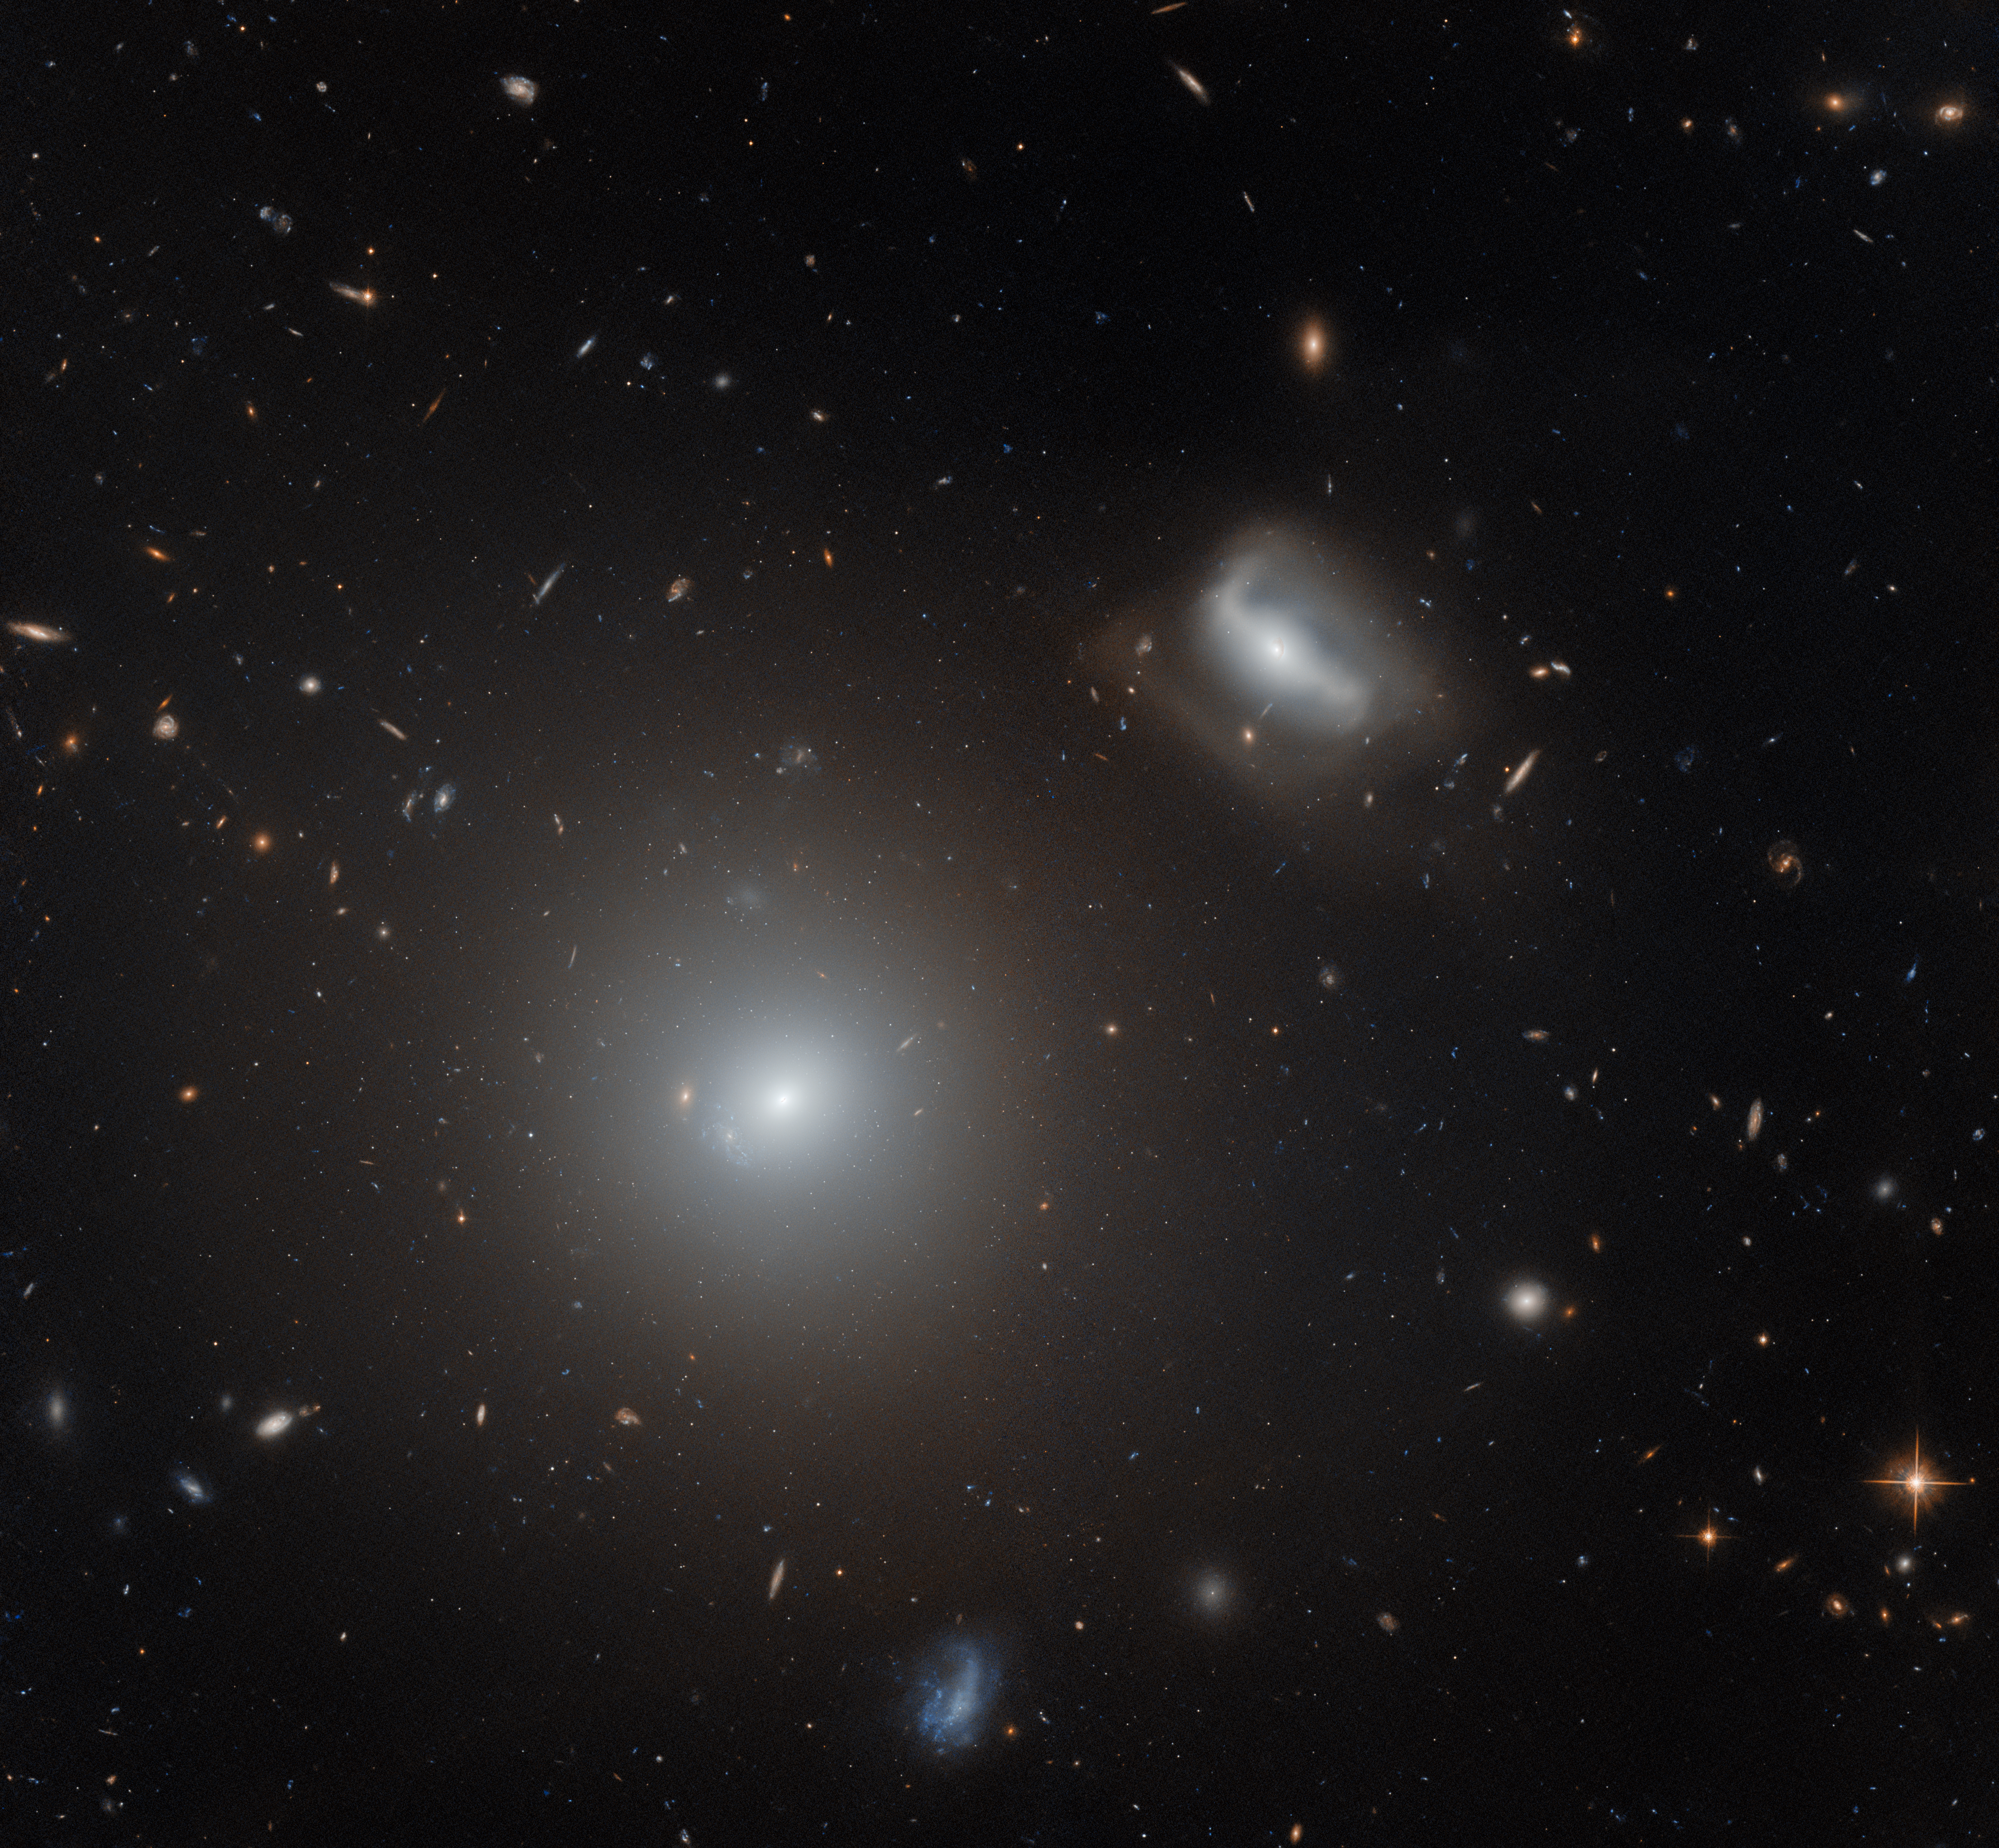

LINER on collision course

This Picture of the Week prominently features two galaxies: NGC 3558 in the lower left, and LEDA 83465 in the upper right. Both galaxies lie roughly 450 million light years from Earth. The two galaxies are separated from one another by a distance of roughly 150 000 light years, which might sound vast, until we consider that our nearest galactic neighbour — the Andromeda galaxy — is a whopping 2.5 million light years distant from the Milky Way galaxy. In galactic terms, the two galaxies pictured here are practically on top of one another.

This is because they belong to a crowded and chaotic galaxy cluster known as Abell 1185, which is packed with galaxies that are interacting with one another via gravity. These galactic interactions have sometimes led to dramatic results, such as galaxies being torn apart completely. This fate has not befallen NGC 3558, which currently retains its integrity as both an elliptical galaxy and a low-ionisation nuclear emission-line region, or LINER. In fact, it probably attained its present form by devouring smaller galaxies in the cluster — galaxies much like LEDA 83465.

LINERs are a particular type of galactic nucleus or core, and are distinguished by the chemical fingerprints written into the light that they emit. As their name suggests, LINERs emit light which suggests that many of the atoms and molecules within these galactic cores have either been weakly ionised or not ionised at all. Ionisation is the process by which atoms or molecules lose or gain electrons. In galaxies, it is driven by a variety of processes — from shockwaves travelling through galaxies, to radiation from massive stars or from hot gas in accretion discs. In the case of LINERs, this means that many of the atoms and molecules within the galaxies have lost either a single electron, or have retained all their electrons. The mechanism that drives this weak ionisation in LINERs such as NGC 3558 is still debated amongst astronomers.

Credit: ESA/Hubble & NASA, M. West